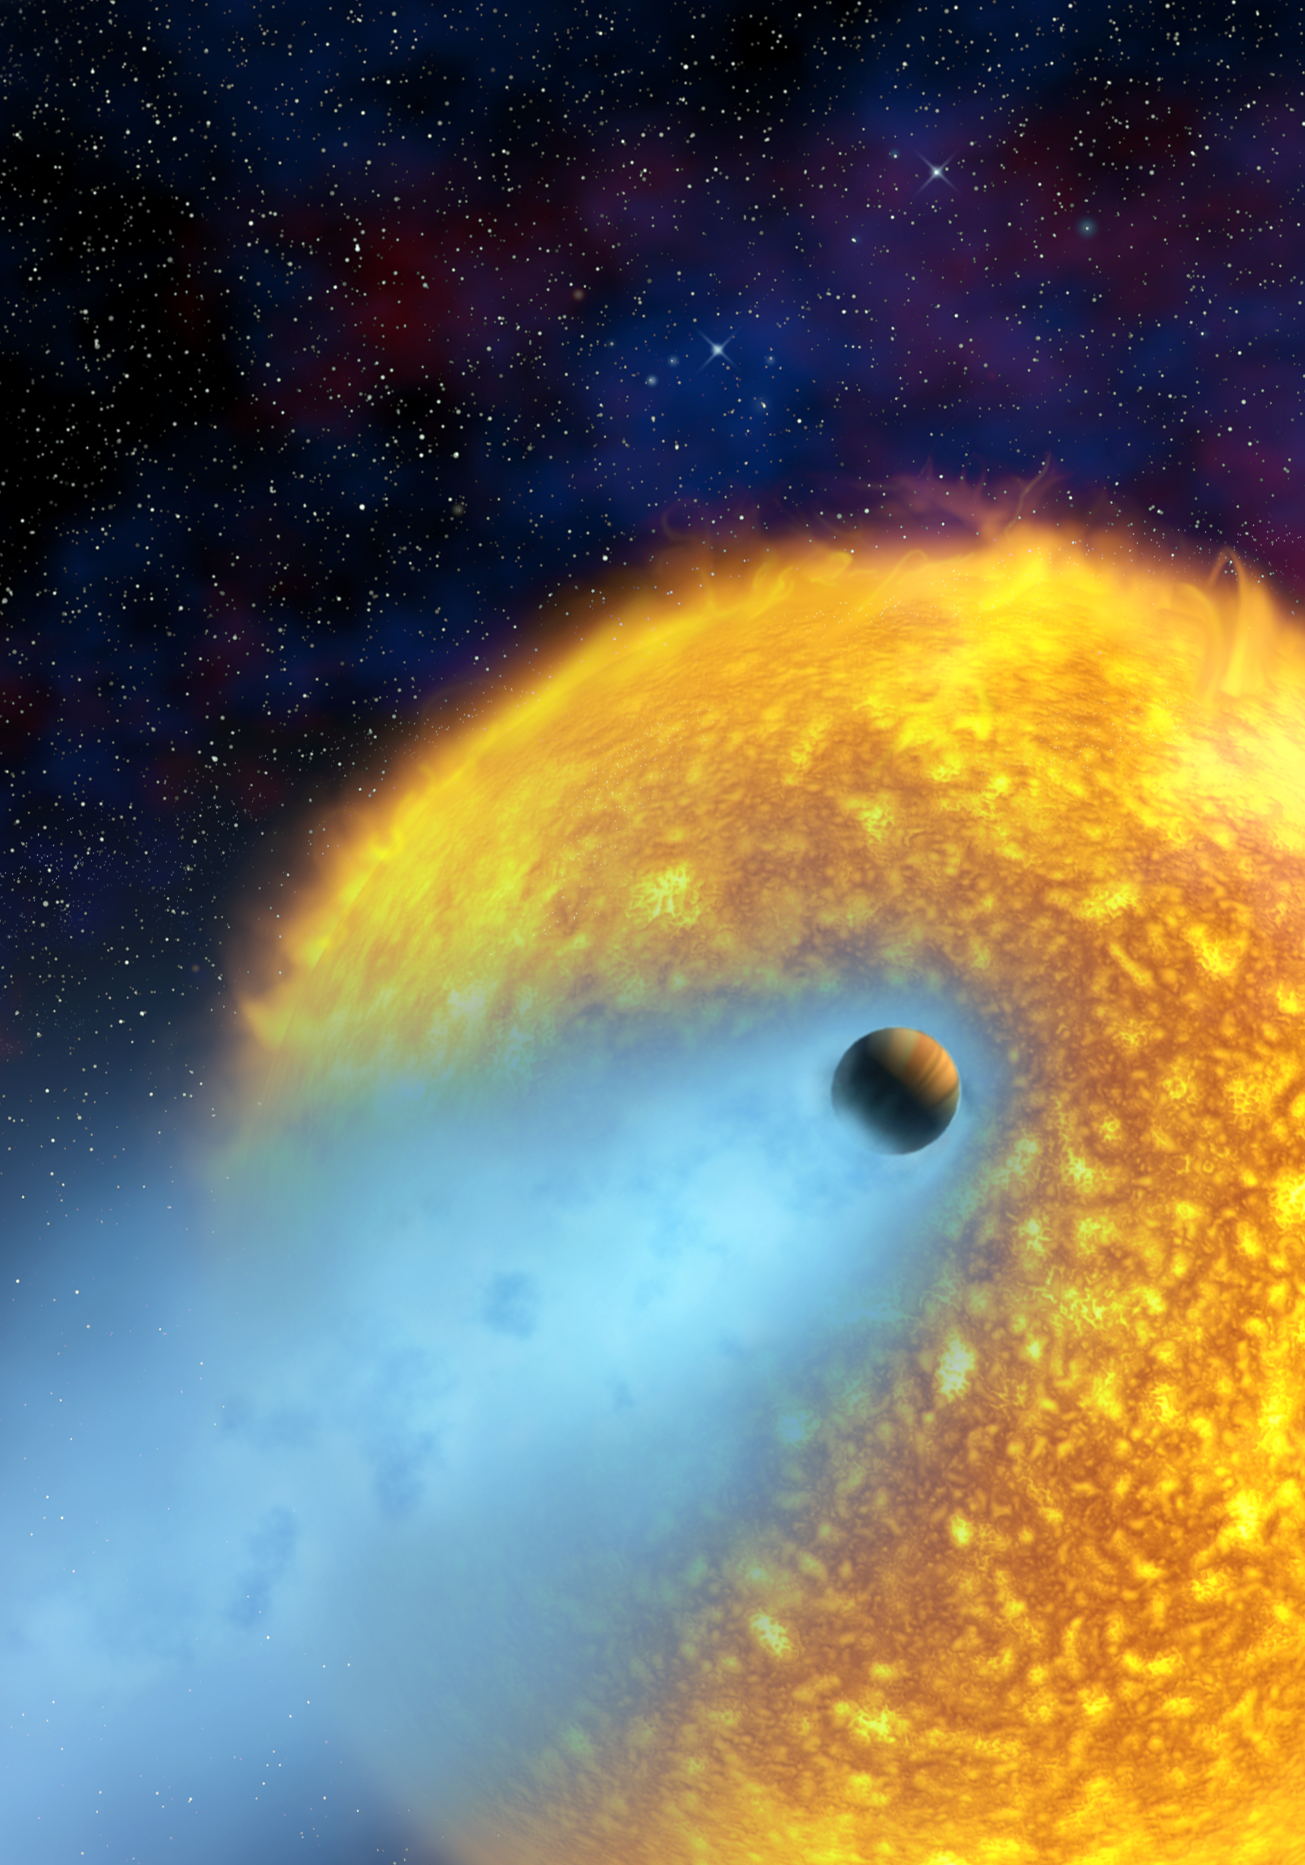

European astronomers observe first evaporating planet [artist's impression]

This artist's impression shows a dramatic close-up of the scorched extrasolar planet HD 209458b in its orbit 'only' 7 million kilometres from its yellow Sun-like star. The planet is a type of extrasolar planet known as a 'hot Jupiter'. Using the NASA/ESA Hubble Space Telescope, for the first time, astronomers have observed the atmosphere of an extrasolar planet evaporating off into space (shown in blue in this illustration). Much of this planet may eventually disappear, leaving only a dense core. Astronomers estimate the amount of hydrogen gas escaping HD 209458b to be at least 10 000 tonnes per second, but possibly much more. The planet may therefore already have lost quite a lot of its mass.

Credit: European Space Agency, Alfred Vidal-Madjar (Institut d'Astrophysique de Paris, CNRS, France) and NASA